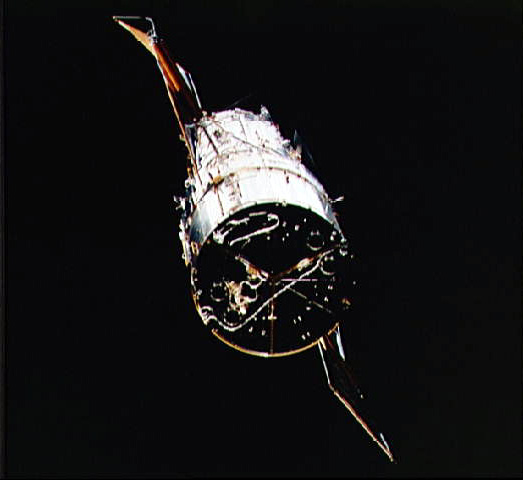

Hubble Space Telescope nears Shuttle Endeavour

In this image we see the NASA and ESA Hubble Space Telescope (HST) approaching the Space Shuttle Endeavour.

Credit: NASA/ESA